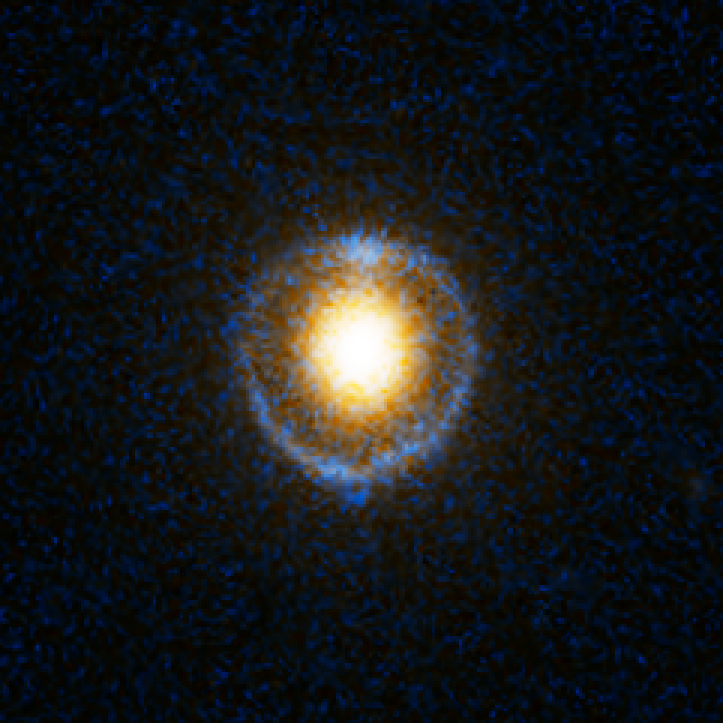

Einstein Ring Gravitational Lens: SDSS J162746.44-005357.5

This object is named SDSS J162746.44-005357.5. It is one of eight similar objects found by combining two powerful astronomical assets, the Sloan Digital Sky Survey (SDSS) and NASA's Hubble Space Telescope.

The objects are know as ‘Eienstein rings’ and are perhaps the most elegant manifestations of the gravitational lensing phenomina. Gravitational lensing occurs when the gravitational field from a massive object warps space and deflects light from a distant object behind it, allowing the distant object to be seen. Einstein rings are produced when two galaxies are almost perfectly aligned, one behind the other, giving an image like this with a reddish-white elliptical galaxy in the foreground and a thin ring of blue surrounding it — which is in fact the distorted light from another galaxy twice as far away.

Credit: NASA, ESA, A. Bolton (Harvard-Smithsonian CfA) and the SLACS Team